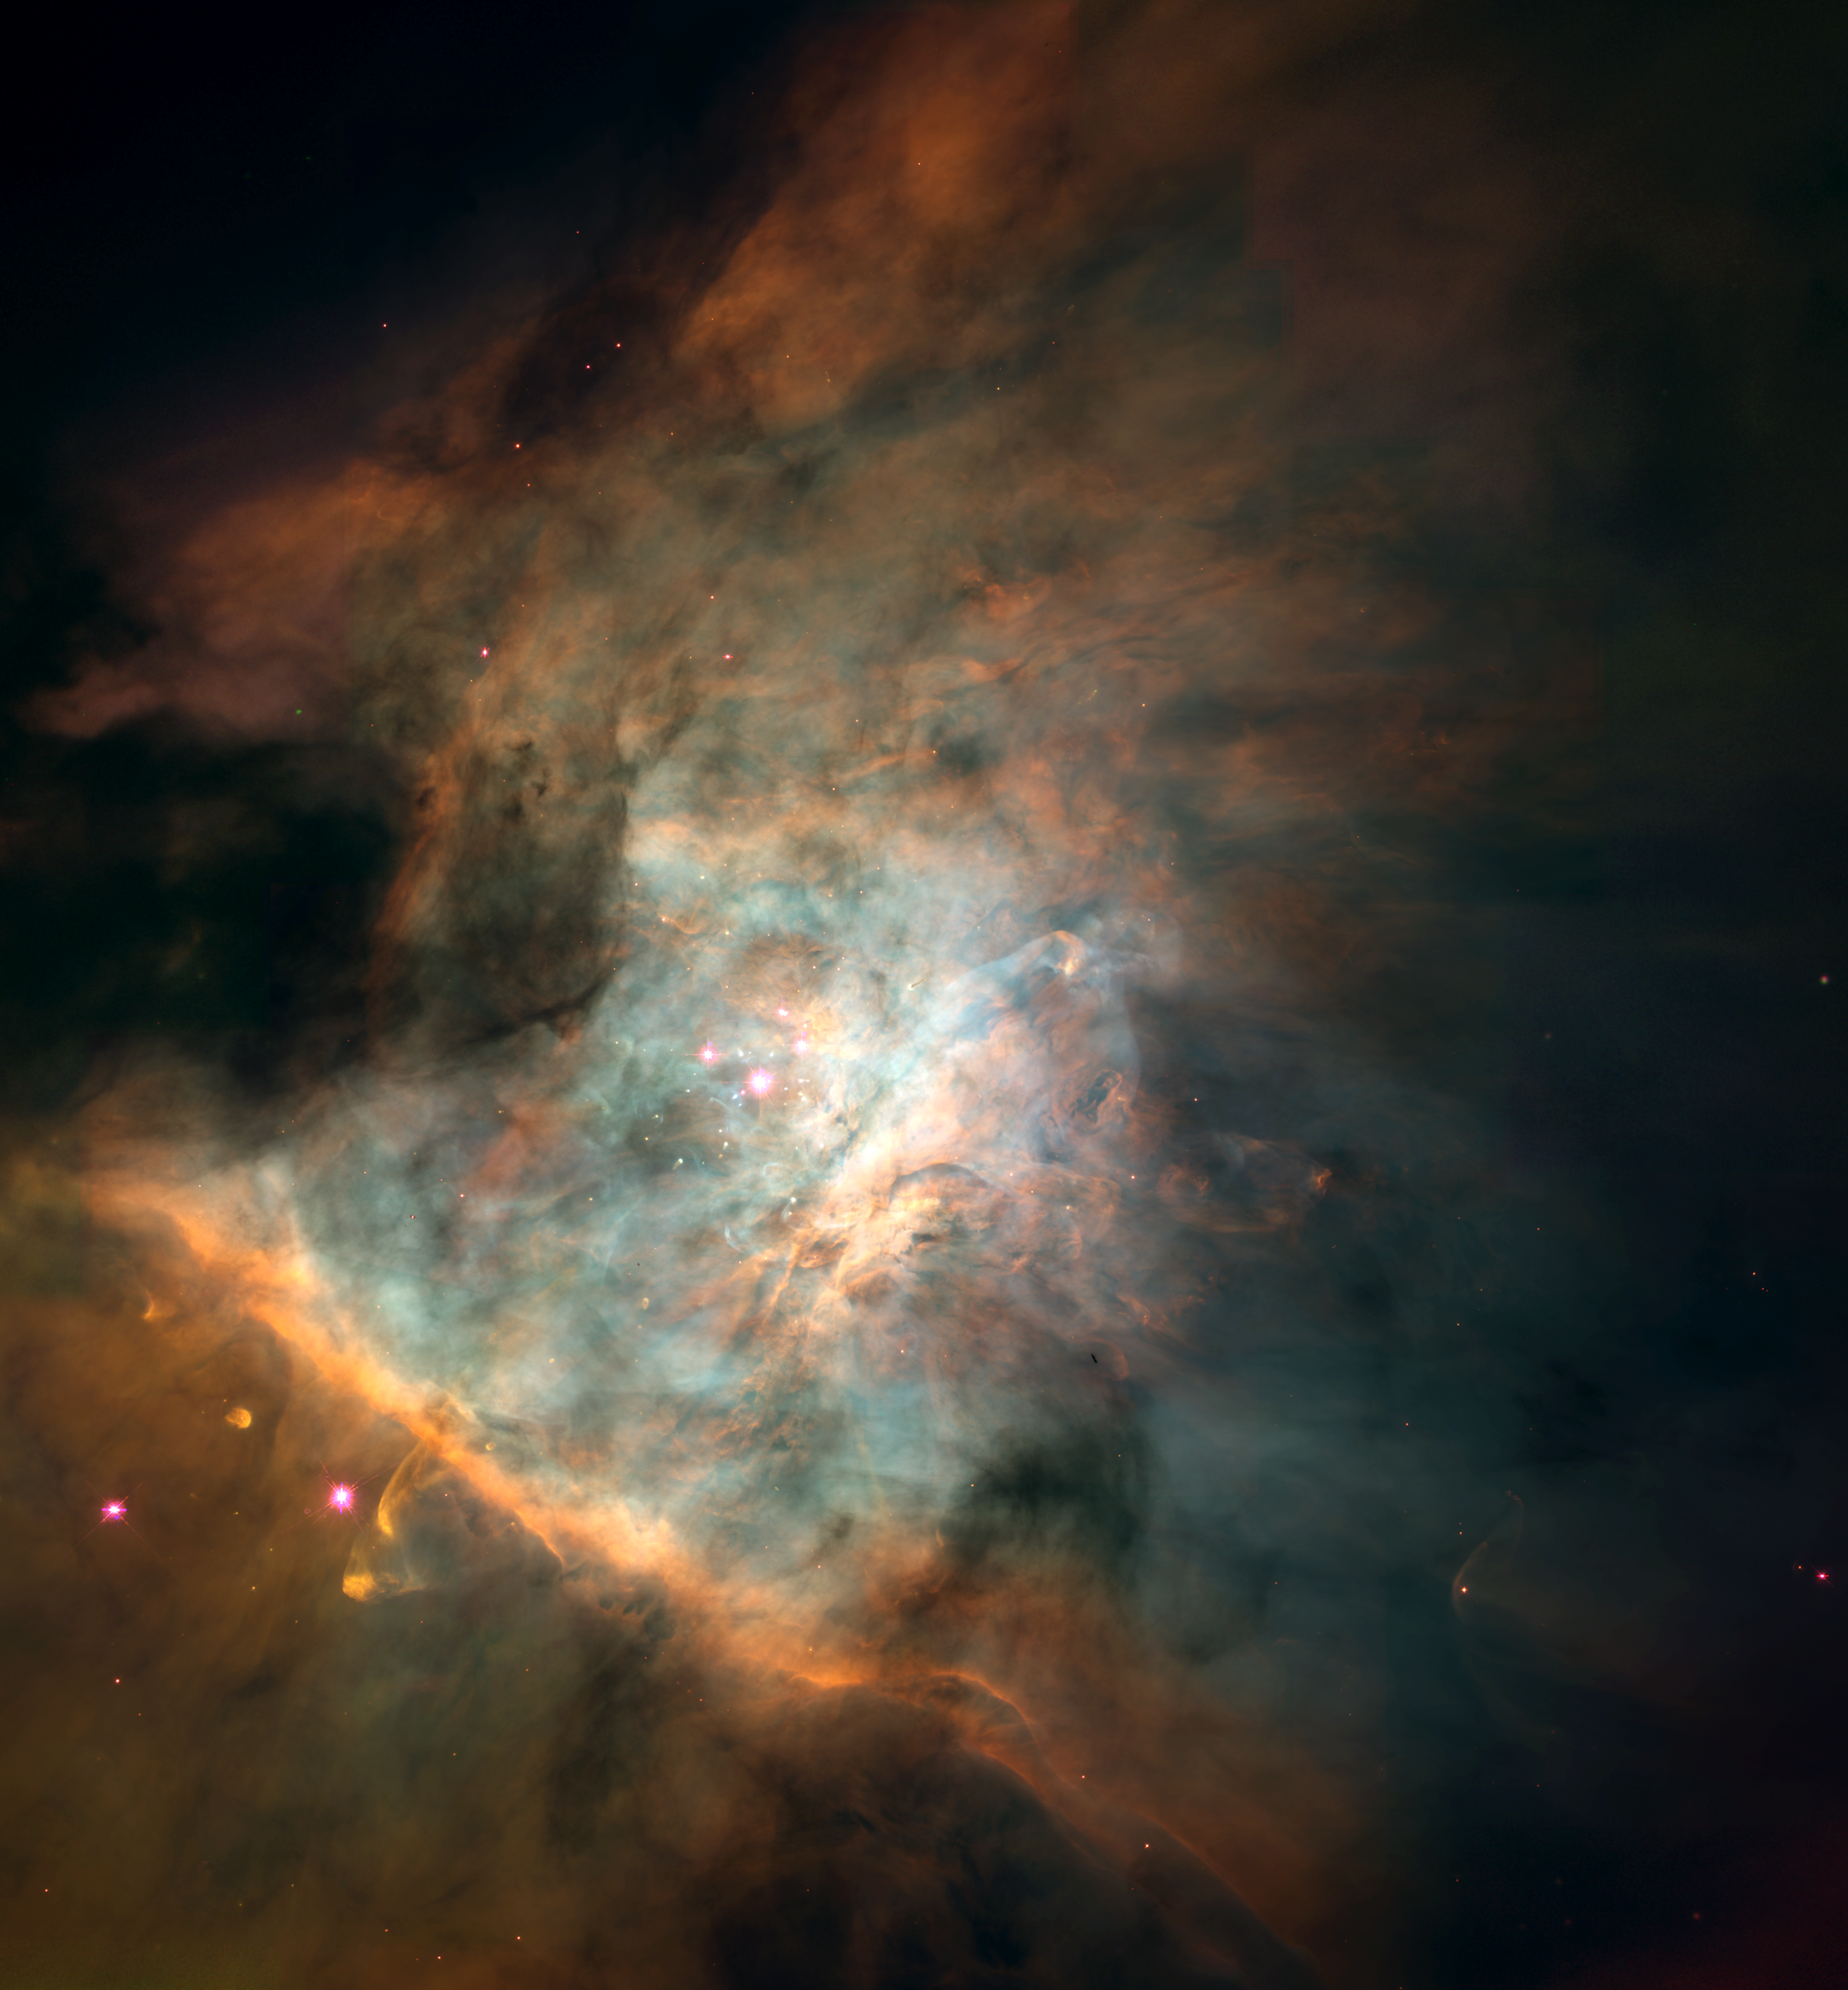

Maelstrom of star birth

This spectacular colour panorama of the center the Orion nebula is one of the largest pictures ever assembled from individual images taken with the Hubble Space Telescope. The picture, seamlessly composited from a mosaic of 15 separate fields, covers an area of sky about five percent the area covered by the full Moon.

Credit: NASA, ESA, C.R. O'Dell (Rice University), and S.K. Wong (Rice University)